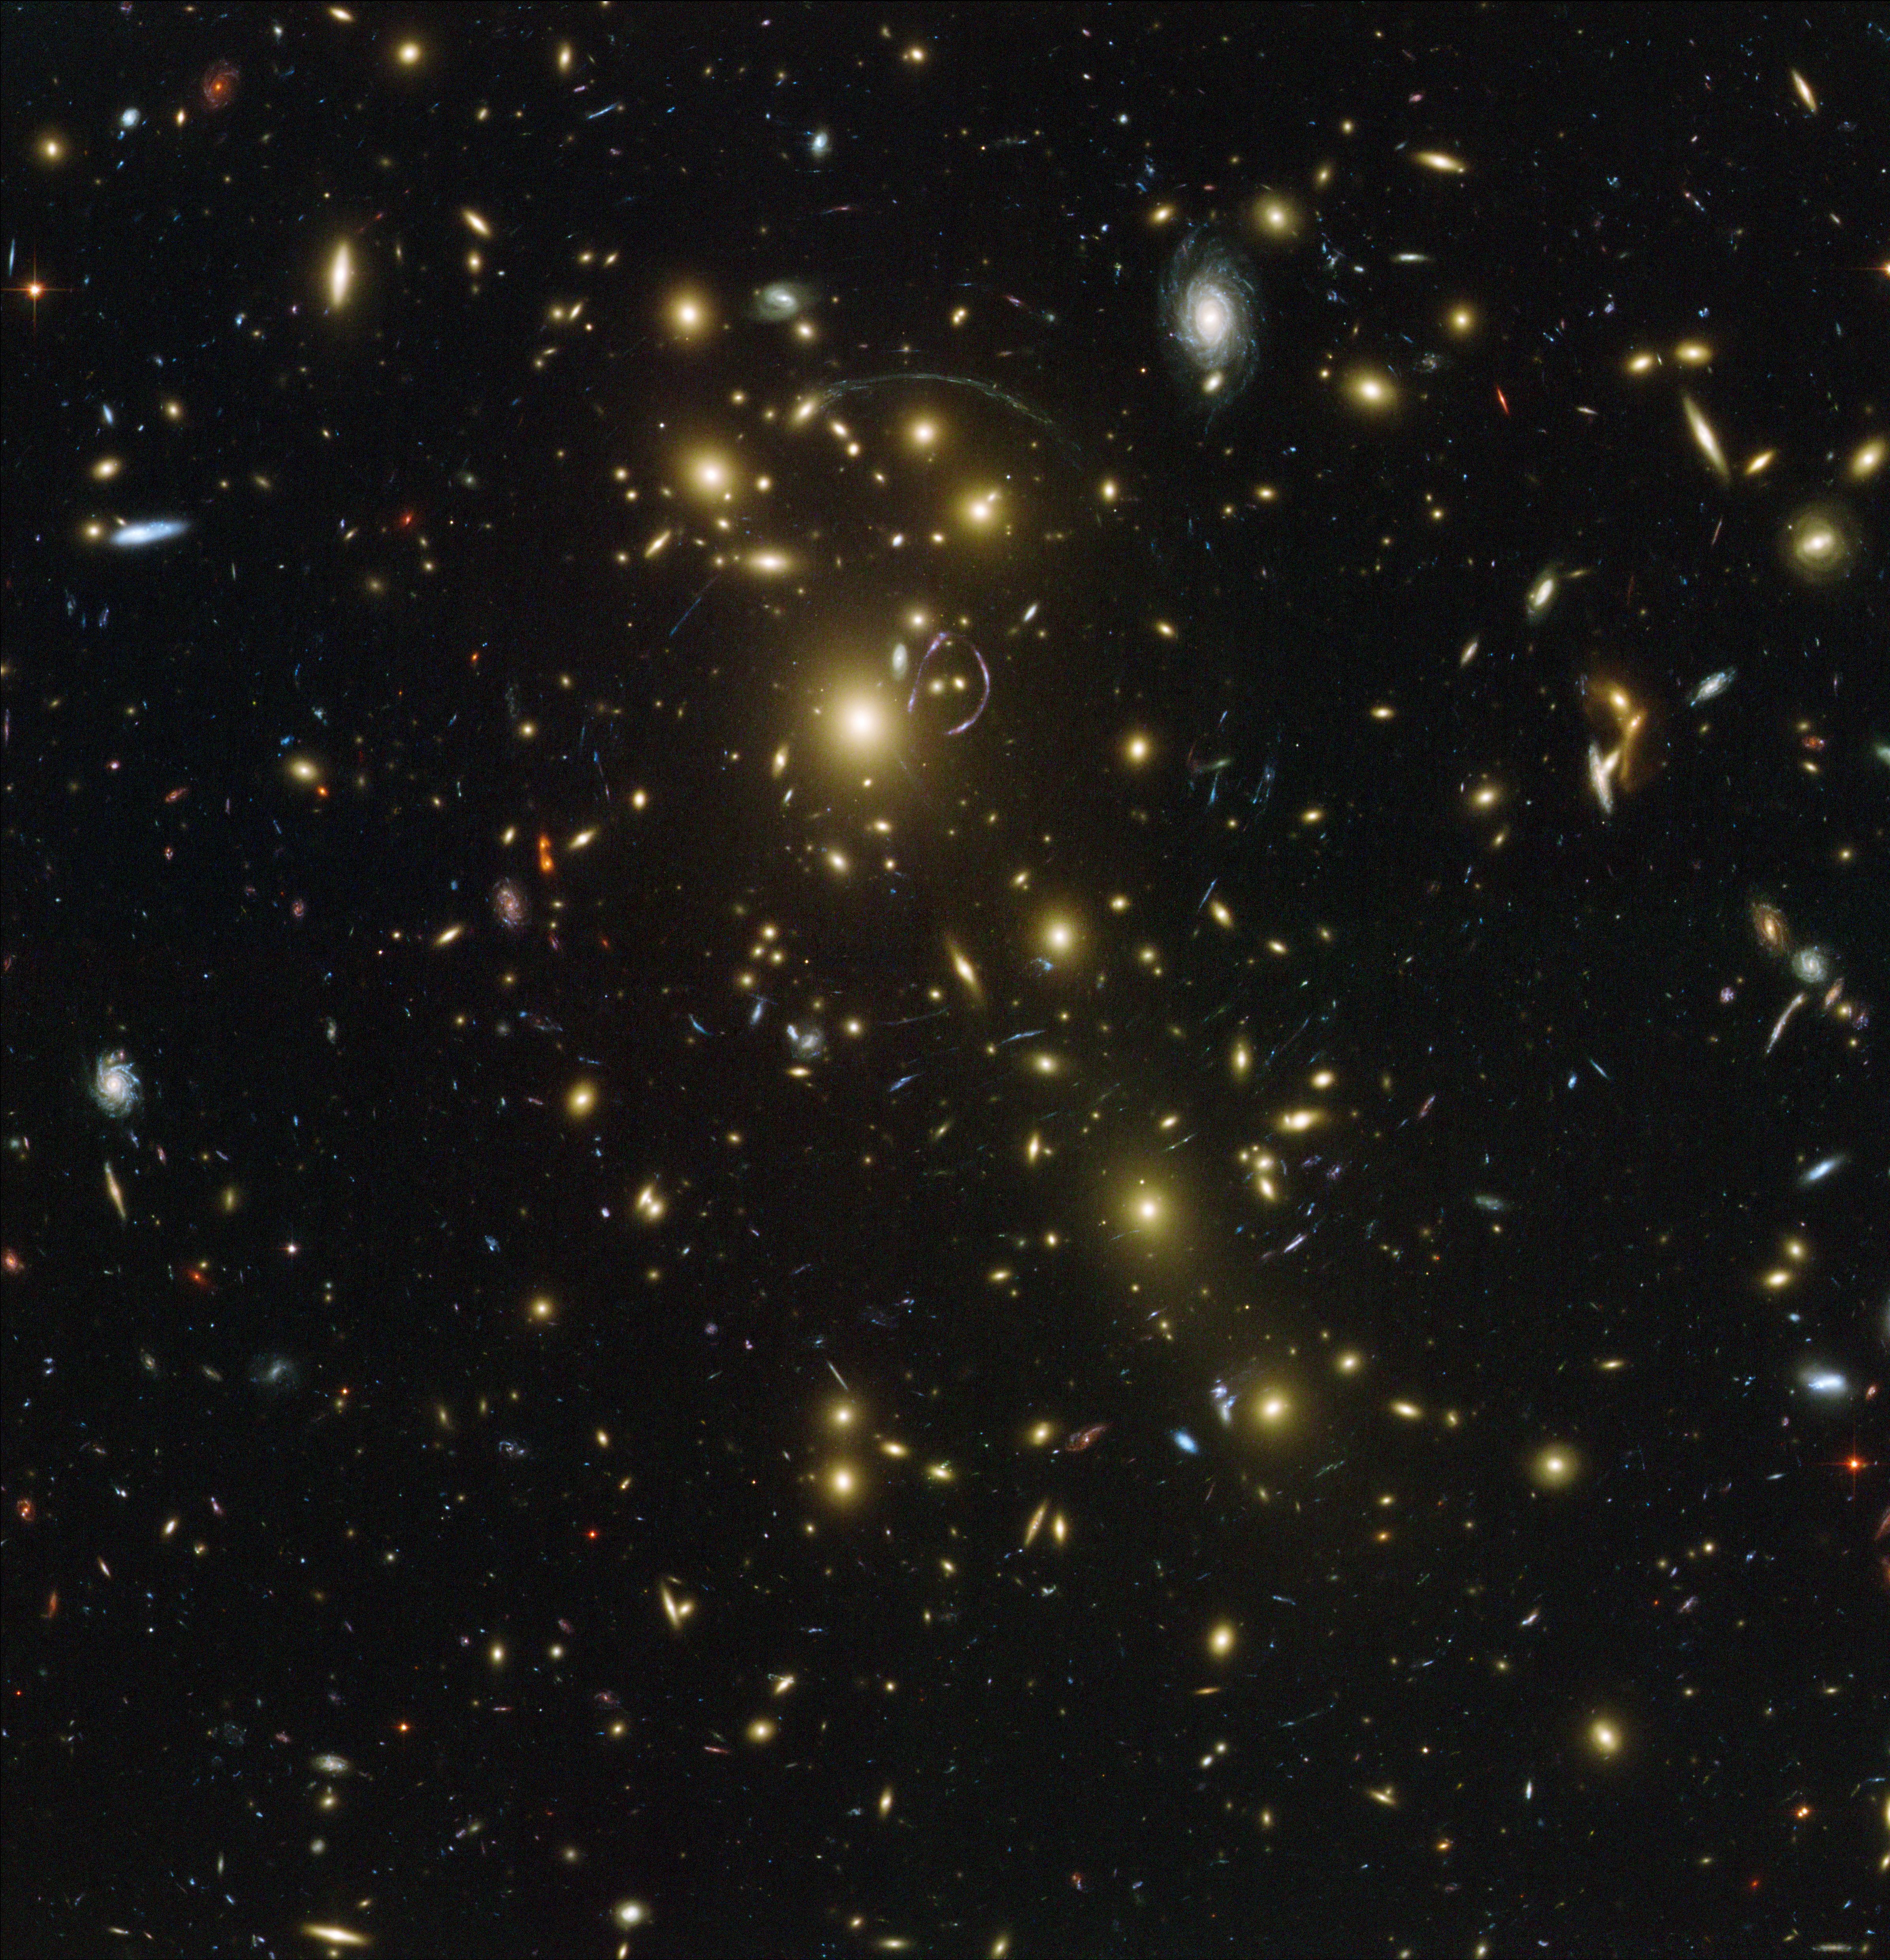

Abell 1703

Located in the northern celestial hemisphere, Abell 1703 is composed of over one hundred different galaxies that act as a powerful cosmic telescope, or gravitational lens. The gravitational lens produced by the massive galaxy cluster in the foreground (the yellow mostly elliptical galaxies scattered across the image) bends the light rays in a way that can stretch the images and so amplify the brightness of the light rays from more distant galaxies. In the process it distorts their shapes and produces multiple banana-shaped images of the original galaxies. The result is the stunning image seen here - a view deeper into the Universe than possible with current technology alone. Abell 1703 is located at 3 billion light-years from the Earth (redshift 0.26).

Credit: NASA, ESA, and Johan Richard (Caltech, USA) Acknowledgement: Davide de Martin & James Long (ESA/Hubble)